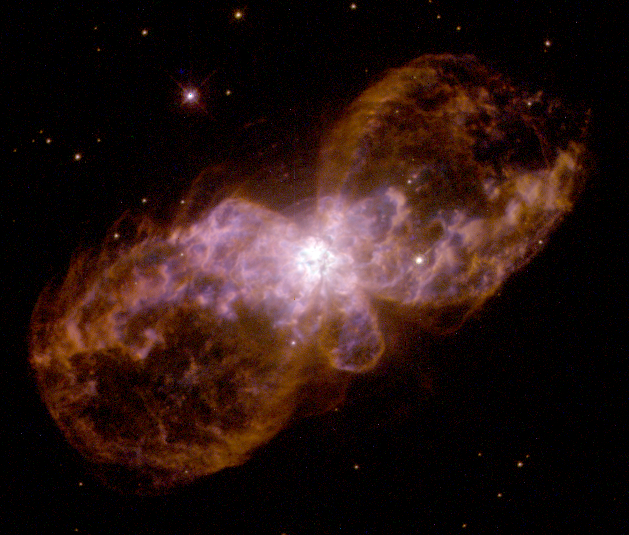

Hubble's planetary nebula gallery. A view of Hubble 5

Hubble 5 is a striking example of a 'butterfly' or bipolar (two-lobed) nebula. The heat generated by fast winds causes each of the lobes to expand, much like a pair of balloons with internal heaters. This observation was taken Sept. 9, 1997 by the Hubble telescope's Wide Field and Planetary Camera 2. Hubble 5 is 2, 200 light-years away in the constellation Sagittarius.

Credit: Bruce Balick (University of Washington), Vincent Icke (Leiden University, The Netherlands), Garrelt Mellema (Stockholm University), and NASA/ESA